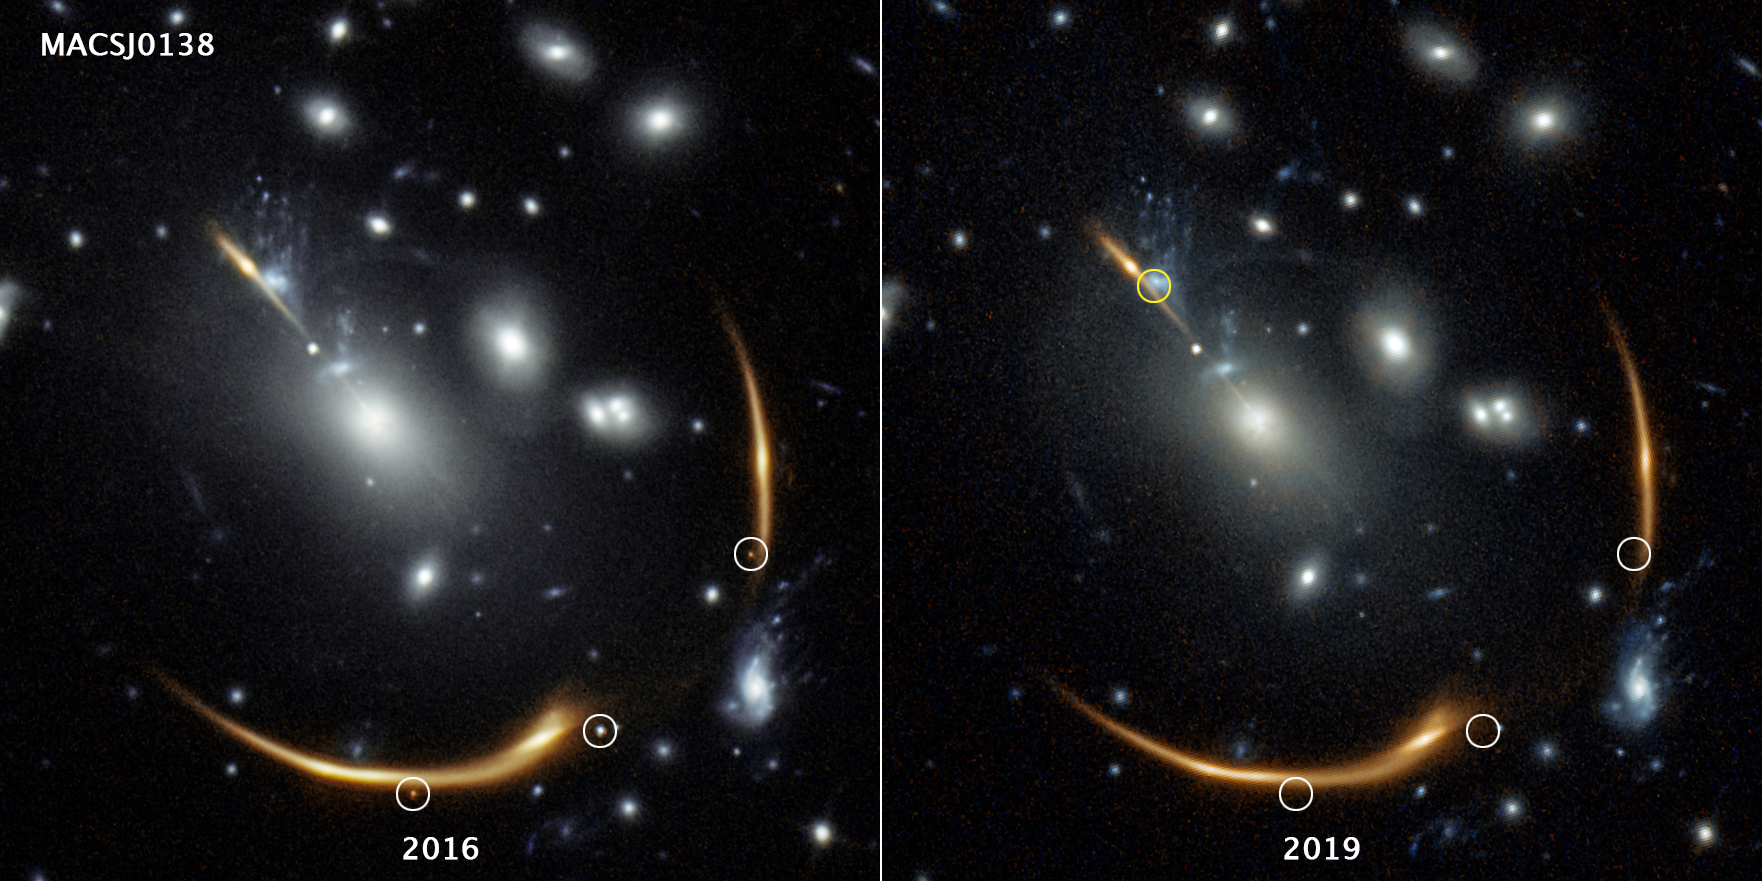

Hubble spots three images of a distant supernova

Three views of the same supernova appear in the 2016 image on the left, taken by the NASA/ESA Hubble Space Telescope. But they're gone in the 2019 image. The distant supernova, named Requiem, is embedded in the giant galaxy cluster MACS J0138. The cluster is so massive that its powerful gravity bends and magnifies the light from the supernova, located in a galaxy far behind it. Called gravitational lensing, this phenomenon also splits the supernova's light into multiple mirror images, highlighted by the white circles in the 2016 image.

The multiply imaged supernova disappears in the 2019 image of the same cluster, at right. The snapshot, taken in 2019, helped astronomers confirm the object's pedigree. Supernovae explode and fade away over time. Researchers predict that a rerun of the same supernova will make an appearance in 2037. The predicted location of that fourth image is highlighted by the yellow circle at top left.

The light from Supernova Requiem needed an estimated 10 billion years for its journey, based on the distance of its host galaxy. The light that Hubble captured from the cluster, MACS J0138.0-2155, took about 4 billion years to reach Earth.

The images were taken in near-infrared light by Hubble's Wide Field Camera 3.

Credit: NASA, ESA, Steve A. Rodney (University of South Carolina), Gabriel Brammer (Cosmic Dawn Center/Niels Bohr Institute/University of Copenhagen), Joseph DePasquale (STScI)